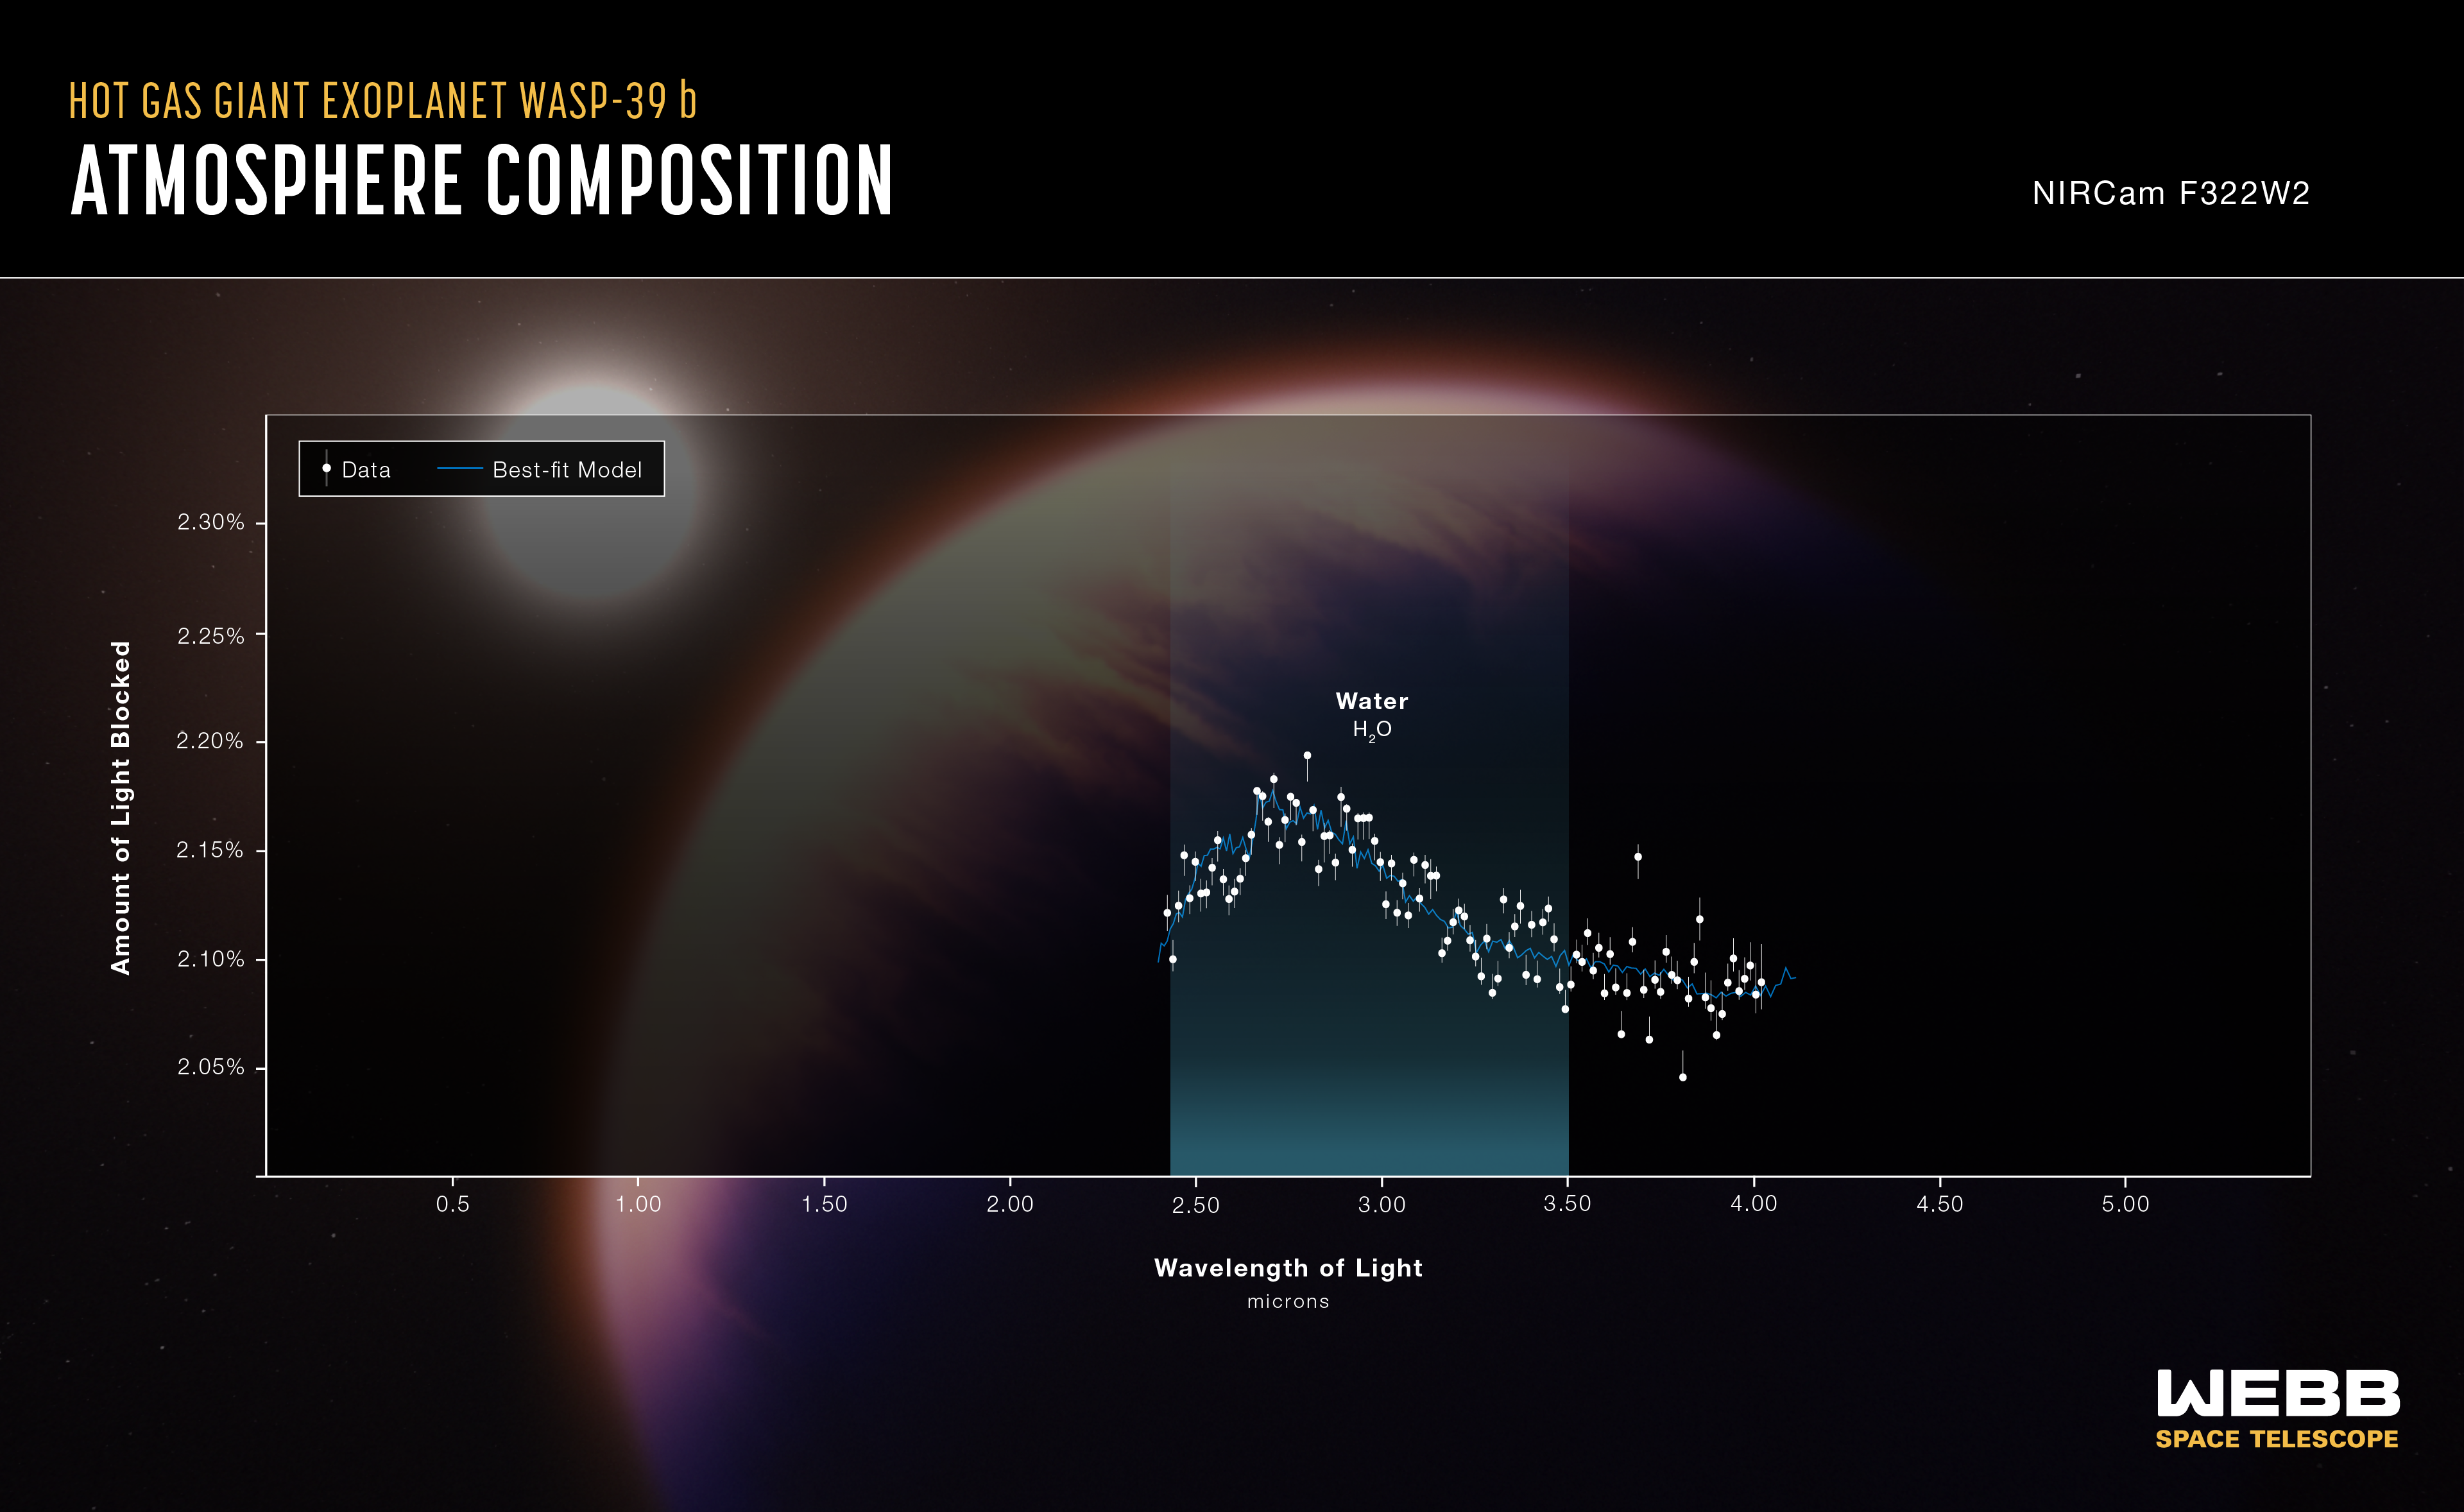

WASP-39 b Atmospheric Composition (NIRCam)

The atmospheric composition of the hot gas giant exoplanet WASP-39 b has been revealed by the NASA/ESA/CSA James Webb Space Telescope.

A transmission spectrum is made by comparing starlight filtered through a planet’s atmosphere as it moves in front of the star, to the unfiltered starlight detected when the planet is beside the star. Each of the data points (white circles) on these graphs represents the amount of a specific wavelength of light that is blocked by the planet and absorbed by its atmosphere. Wavelengths that are preferentially absorbed by the atmosphere appear as peaks in the transmission spectrum.

The blue line is a best-fit model that takes into account the data, the known properties of WASP-39 b and its star (e.g., size, mass, temperature), and assumed characteristics of the atmosphere. Researchers can vary the parameters in the model – changing unknown characteristics like cloud height in the atmosphere and abundances of various gases – to get a better fit and further understand what the atmosphere is really like.

This graph displays data from Webb's NIRCam instrument, showing a prominent water signature.

Credit: NASA, ESA, CSA, J. Olmsted (STScI)